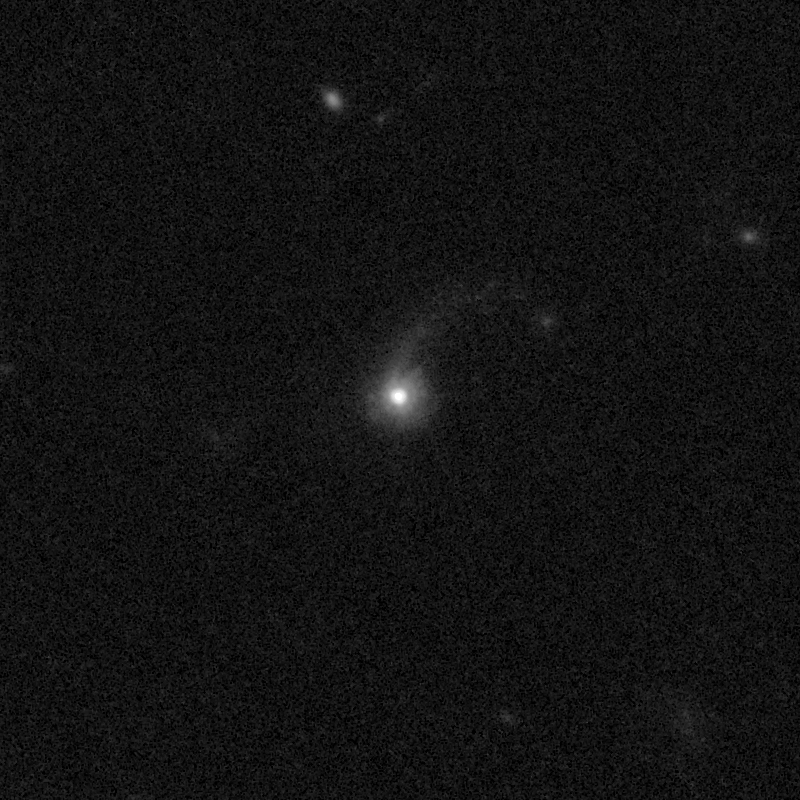

Outflows from merging galaxy J1104+5946

This NASA/ESA Hubble Space Telescope image of the galaxy J1104+5946 shows it is undergoing a firestorm of star birth, as shown by its bright white cores.

This star-making frenzy was ignited by mergers with other galaxies. The odd shape of the galaxy is telltale evidence of a close encounters.

The new Hubble Wide Field Camera 3 observations of this and eleven other galaxies undergoing the same process suggest that energy from the star-birthing frenzies created powerful winds that are blowing out the gas, meaning it is not available to form future generations of stars.

This activity occurred when the Universe was half its current age of 13.7 billion years. The gas-poor galaxies may eventually become so-called red and dead galaxies, composed only of aging stars.

This Hubble false-colour image was processed to bring out important details in the galaxy. The images were taken in 2010.

Credit: NASA, ESA, and P. Sell (Texas Tech University)